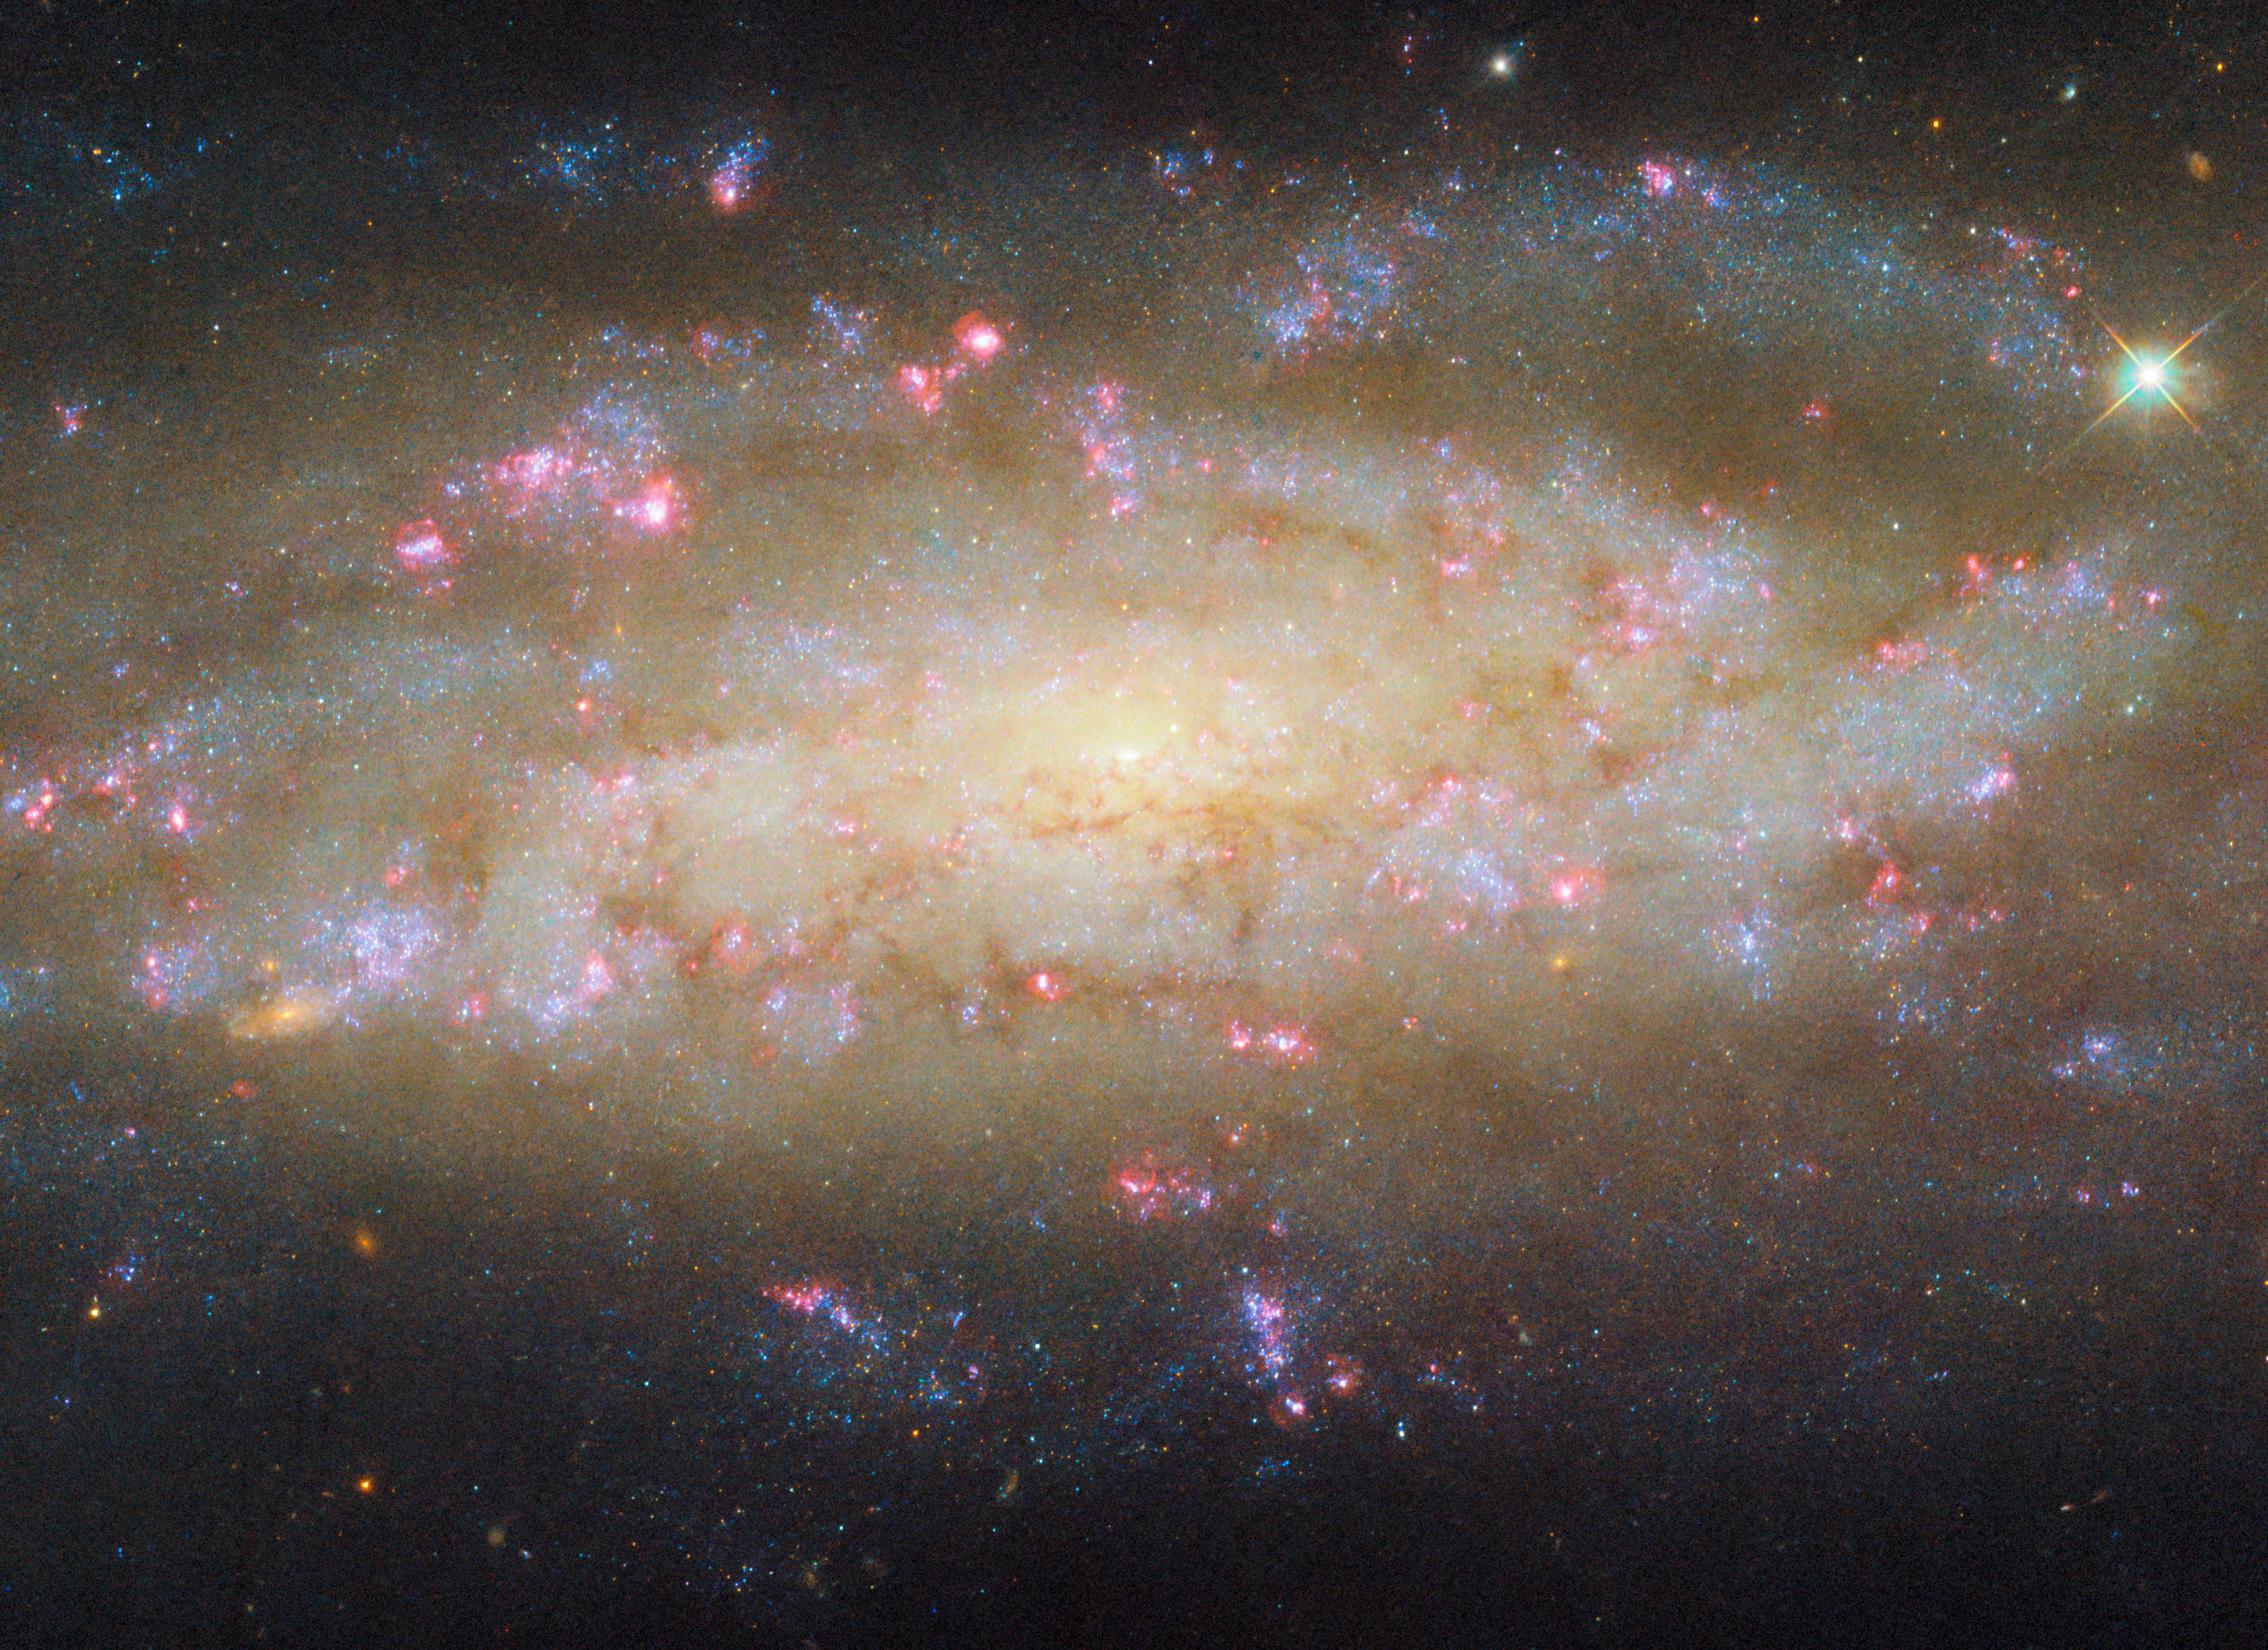

A galaxy with lots to see

While it may appear unassuming at first glance, just another spiral galaxy among thousands in the Universe, this subject of the ESA/Hubble Picture of the Week has plenty to study. NGC 7456 is its name, located over 51 million light-years away in the constellation Grus (the Crane).

In this image we see in fine detail the patchy spiral arms of this galaxy, followed by clumps of dark, obscuring dust. Blossoms of glowing pink are rich reservoirs of gas where new stars are forming, illuminating the clouds around them and causing the gas to emit this tell-tale red light. The Hubble programme which collected this data is focused on stellar activity just like this, tracking new stars, clouds of hydrogen and star clusters to learn how the galaxy has evolved through time.

Hubble, with its ability to capture visible, ultraviolet and some infrared light, is not the only observatory focused on NGC 7456. ESA’s XMM-Newton satellite has imaged X-rays from the galaxy on multiple occasions, discovering a number of so-called ultraluminous X-ray sources. These small, compact objects emit terrifically powerful X-rays, much more than would be expected for their size. Astronomers are still trying to pin down what powers these extreme objects, and NGC 7456 contributes a few more examples.

On top of that, the region around the galaxy’s supermassive black hole is spectacularly bright and energetic, making NGC 7456 an active galaxy. Whether looking at its core or its outskirts, at visible light or X-rays, this galaxy has something interesting to show!

Credit: ESA/Hubble & NASA, D. Thilker